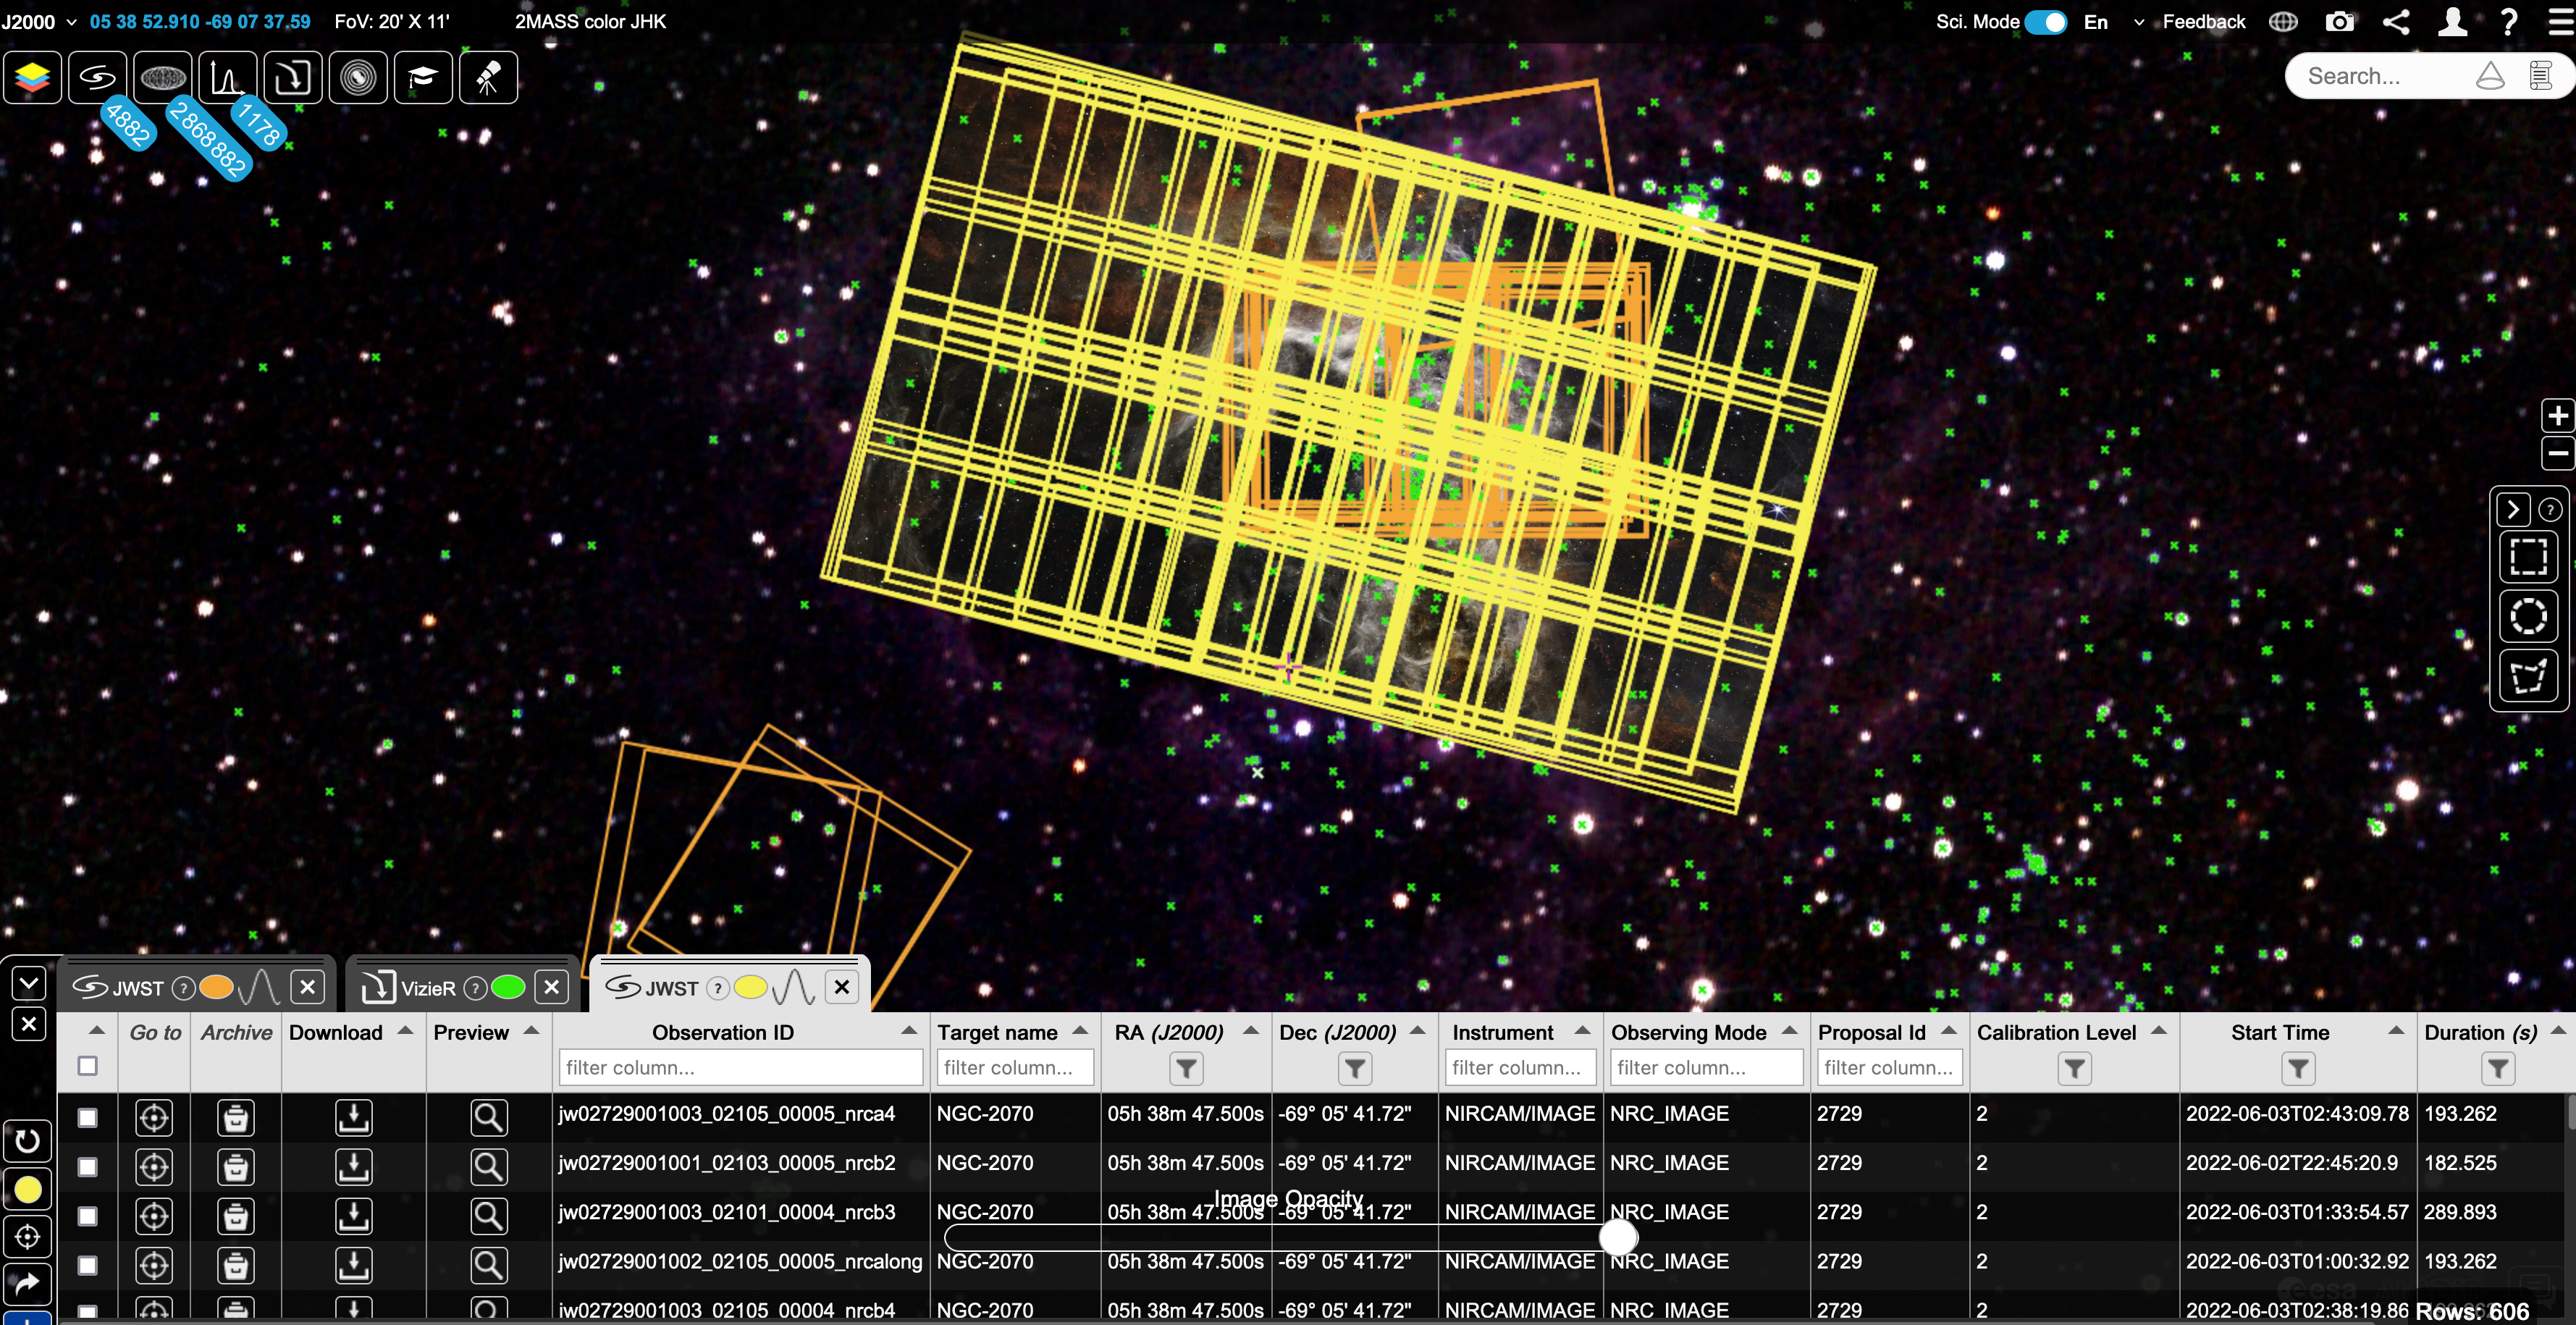

ESASky Screenshot - 30 Doradus

Screenshot from ESASky of JWST NIRCam and MIRI data footprints for the 30 Doradus region, with targets with visible spectroscopy from the VLT highlighted by the green crosses.

Credit: eHST